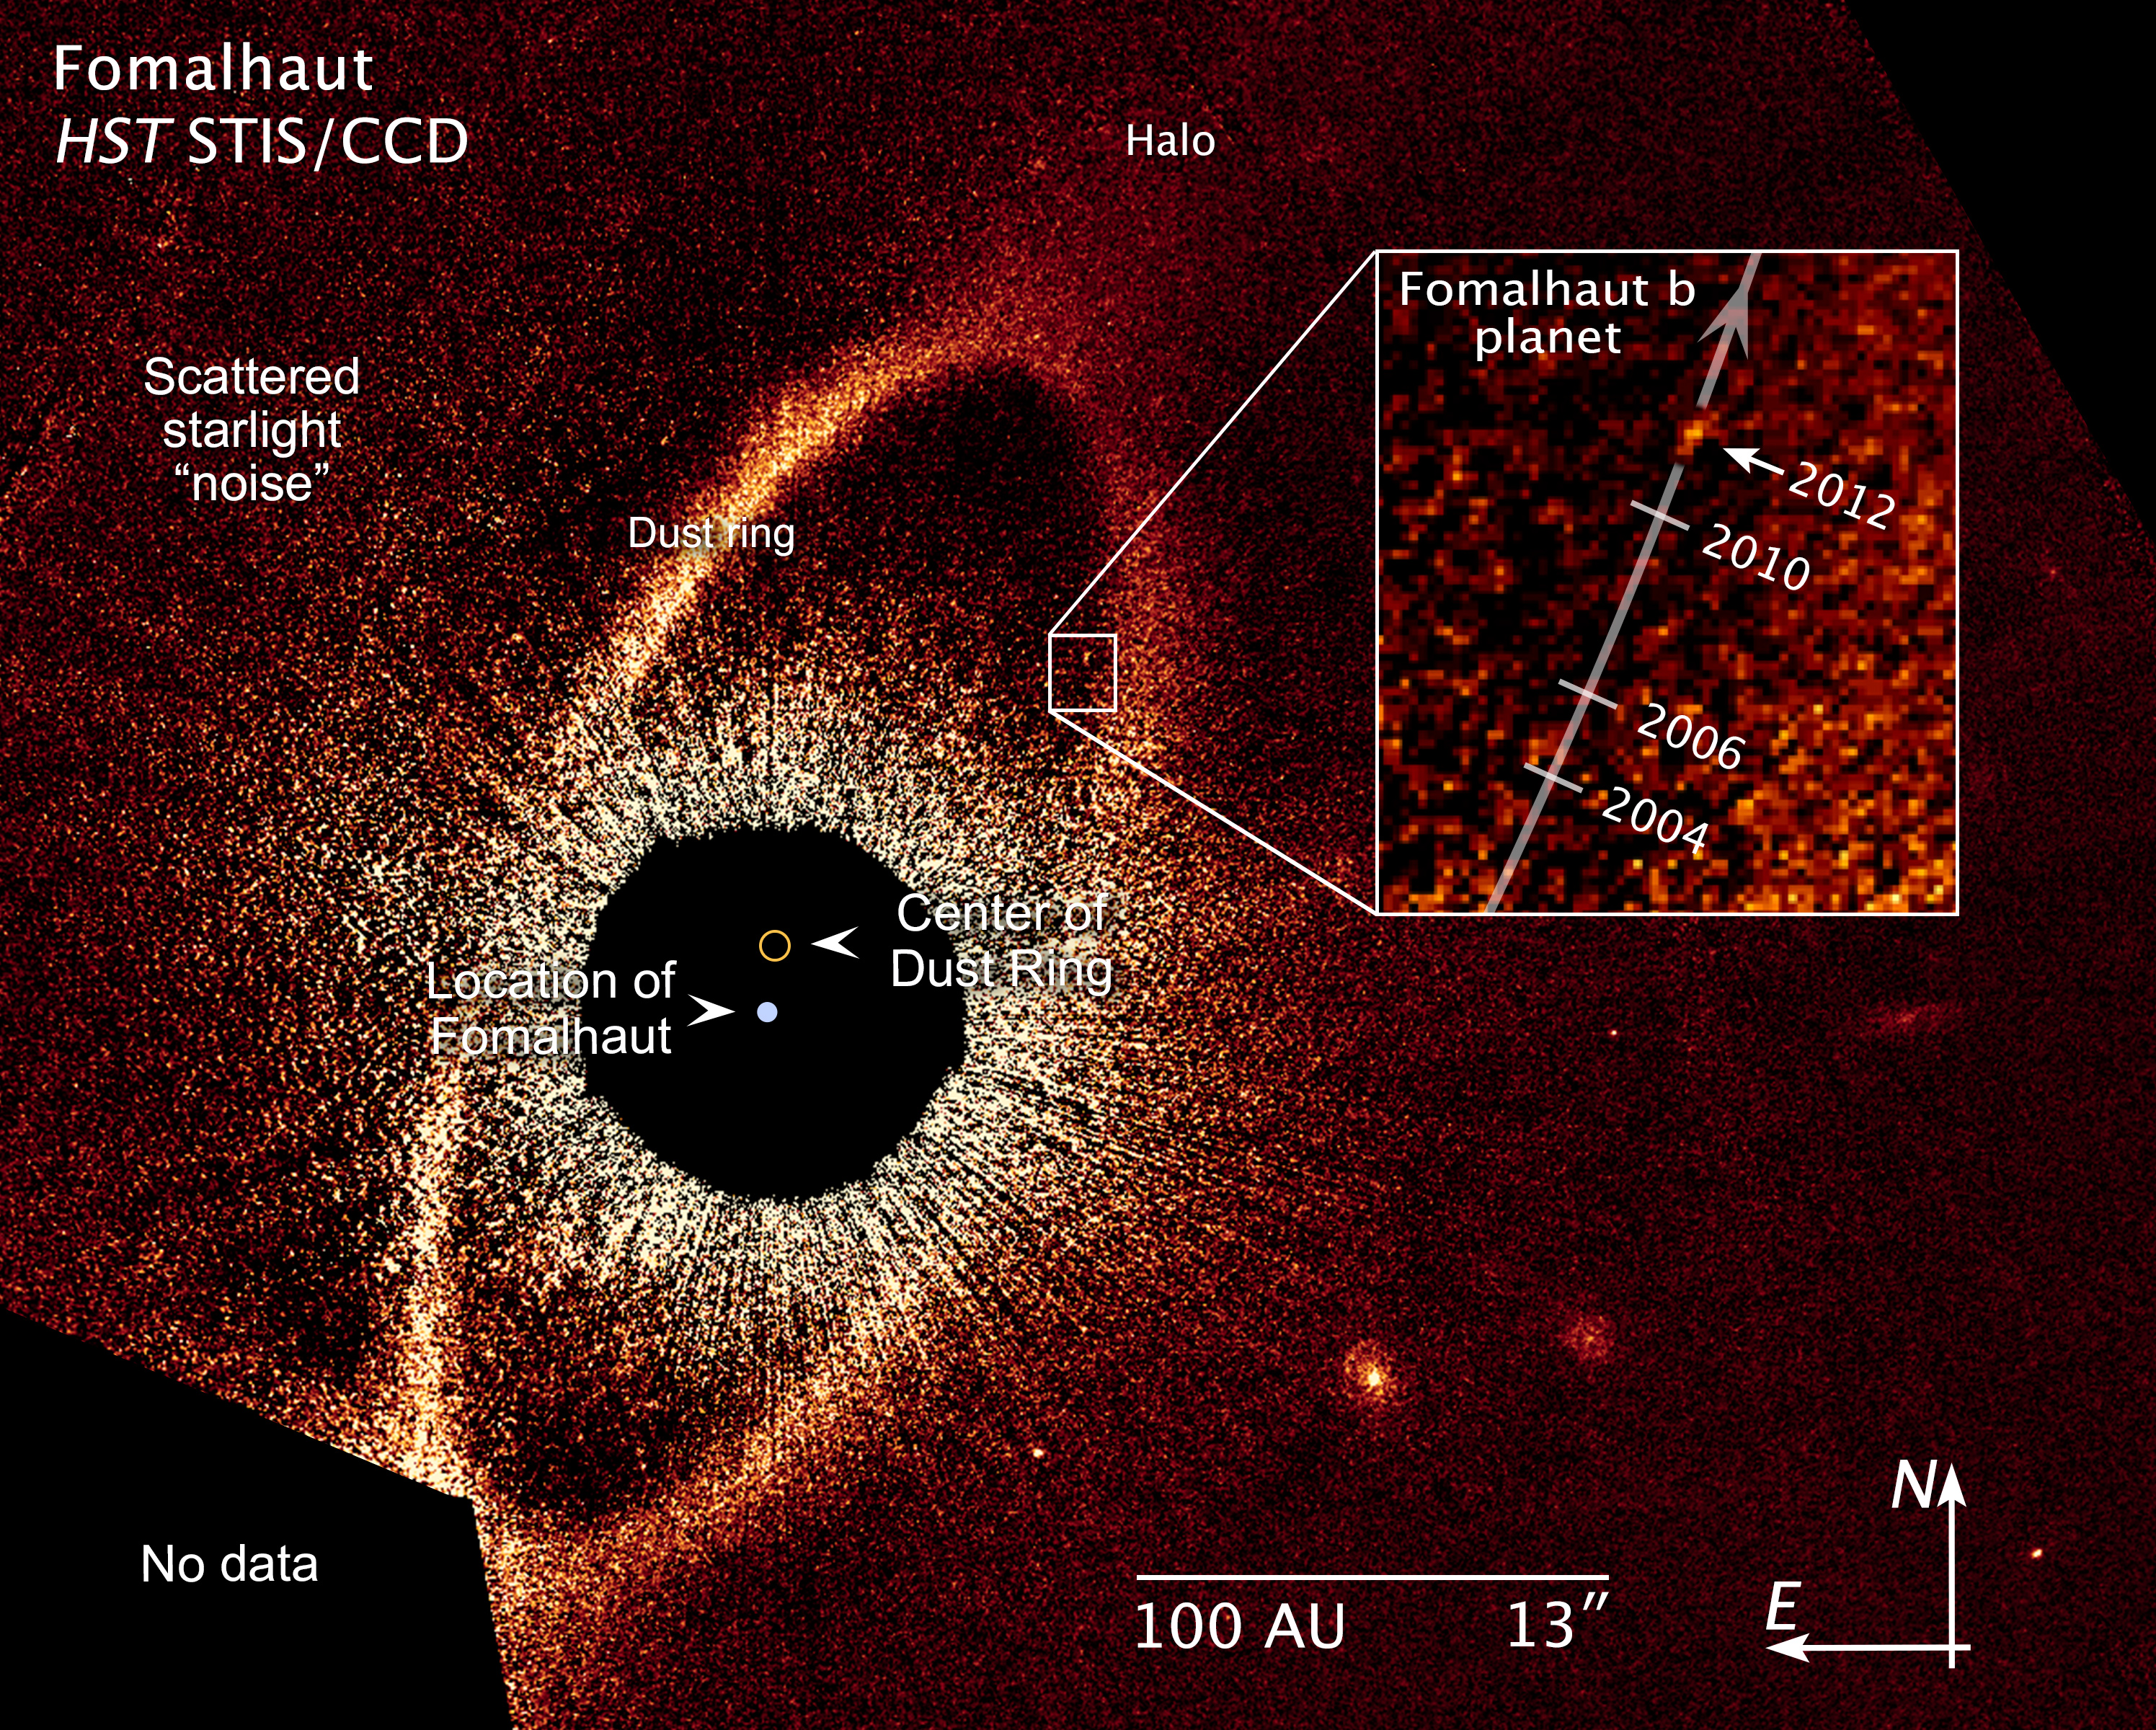

Compass and scale image for Fomalhaut b

Compass and scale image for Fomalhaut b.

Credit: NASA, ESA and Z. Levay (STScI) Science Credit: NASA, ESA and P. Kalas (University of California, Berkeley, USA)